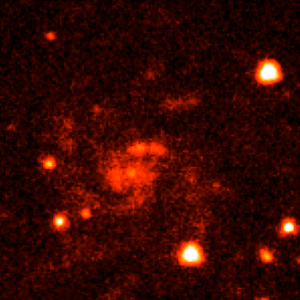

Gamma-ray burst host galaxy GRB990705

This is an image of Gamma-ray Burst Host Galaxy GRB990705. Long-duration gamma-ray bursts are powerful flashes of high-energy radiation that are sometimes seen coming from supernovae — the explosions of extremely massive stars. This image is one of a set of images, taken by NASA’s Hubble Space Telescope, which show the galaxies that host these bursts and could help to tell us more about their cause.

Credit: NASA, ESA, A. Fruchter (STScI), and the GOSH Collaboration